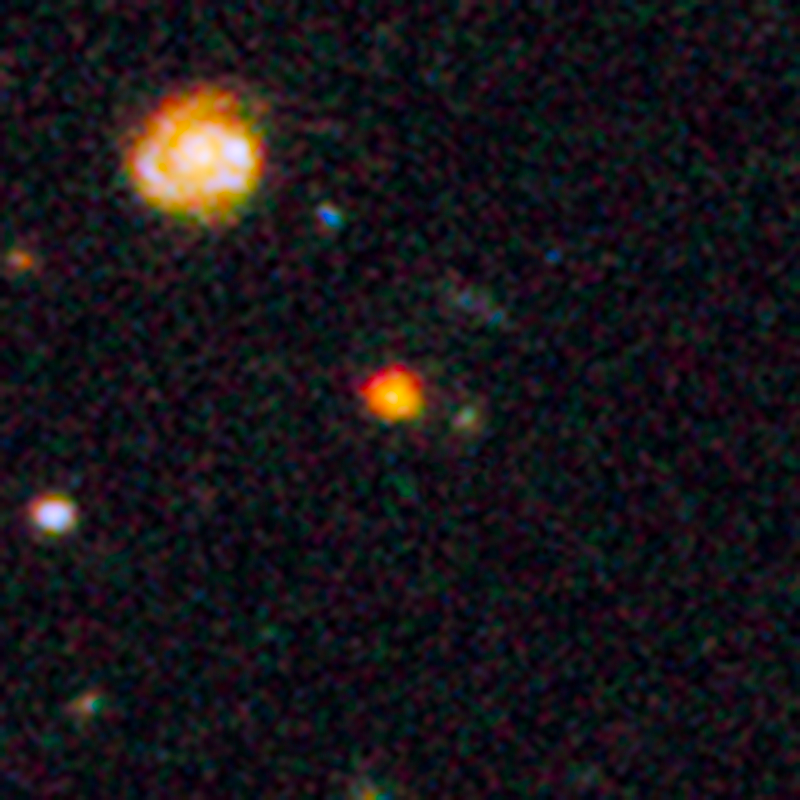

Inset view of distant galaxy GOODS-N-774

This image shows observations of a newly discovered galaxy core dubbed GOODS-N-774, taken by the NASA/ESA Hubble Space Telescope's Wide Field Camera 3 and Advanced Camera for Surveys. This galaxy core was spotted in part of the Hubble GOODS-N field (Great Observatories Origins Deep Survey). The core can be seen in its larger context in the annotated image of Hubble's GOODS North field.

This is the first time that a galaxy has been spotted at this stage of formation — a very early stage where the dense galactic core is still furiously churning out newborn stars. GOODS-N-774 is seen here as it appeared eleven billion years ago, just three billion years after the Big Bang.

After this stage, galaxies like this are thought to build up "inside out", expanding outwards via mergers with other smaller galaxies to become giant elliptical galaxies.

Credit: NASA, ESA, and E. Nelson (Yale University)